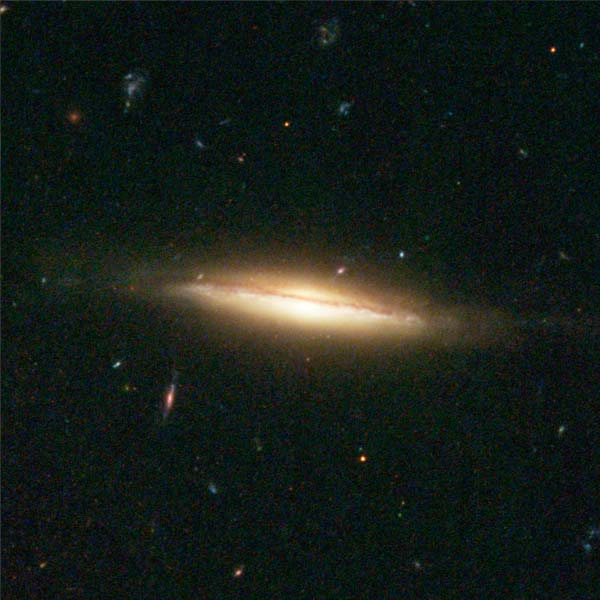

Details from ACS Image of NGC 3370: Middle Right

A Sombrero-galaxy-look-alike is seen edge on with a small warp in the middle right.

Credit: NASA/ESA, The Hubble Heritage Team and A. Riess (STScI)